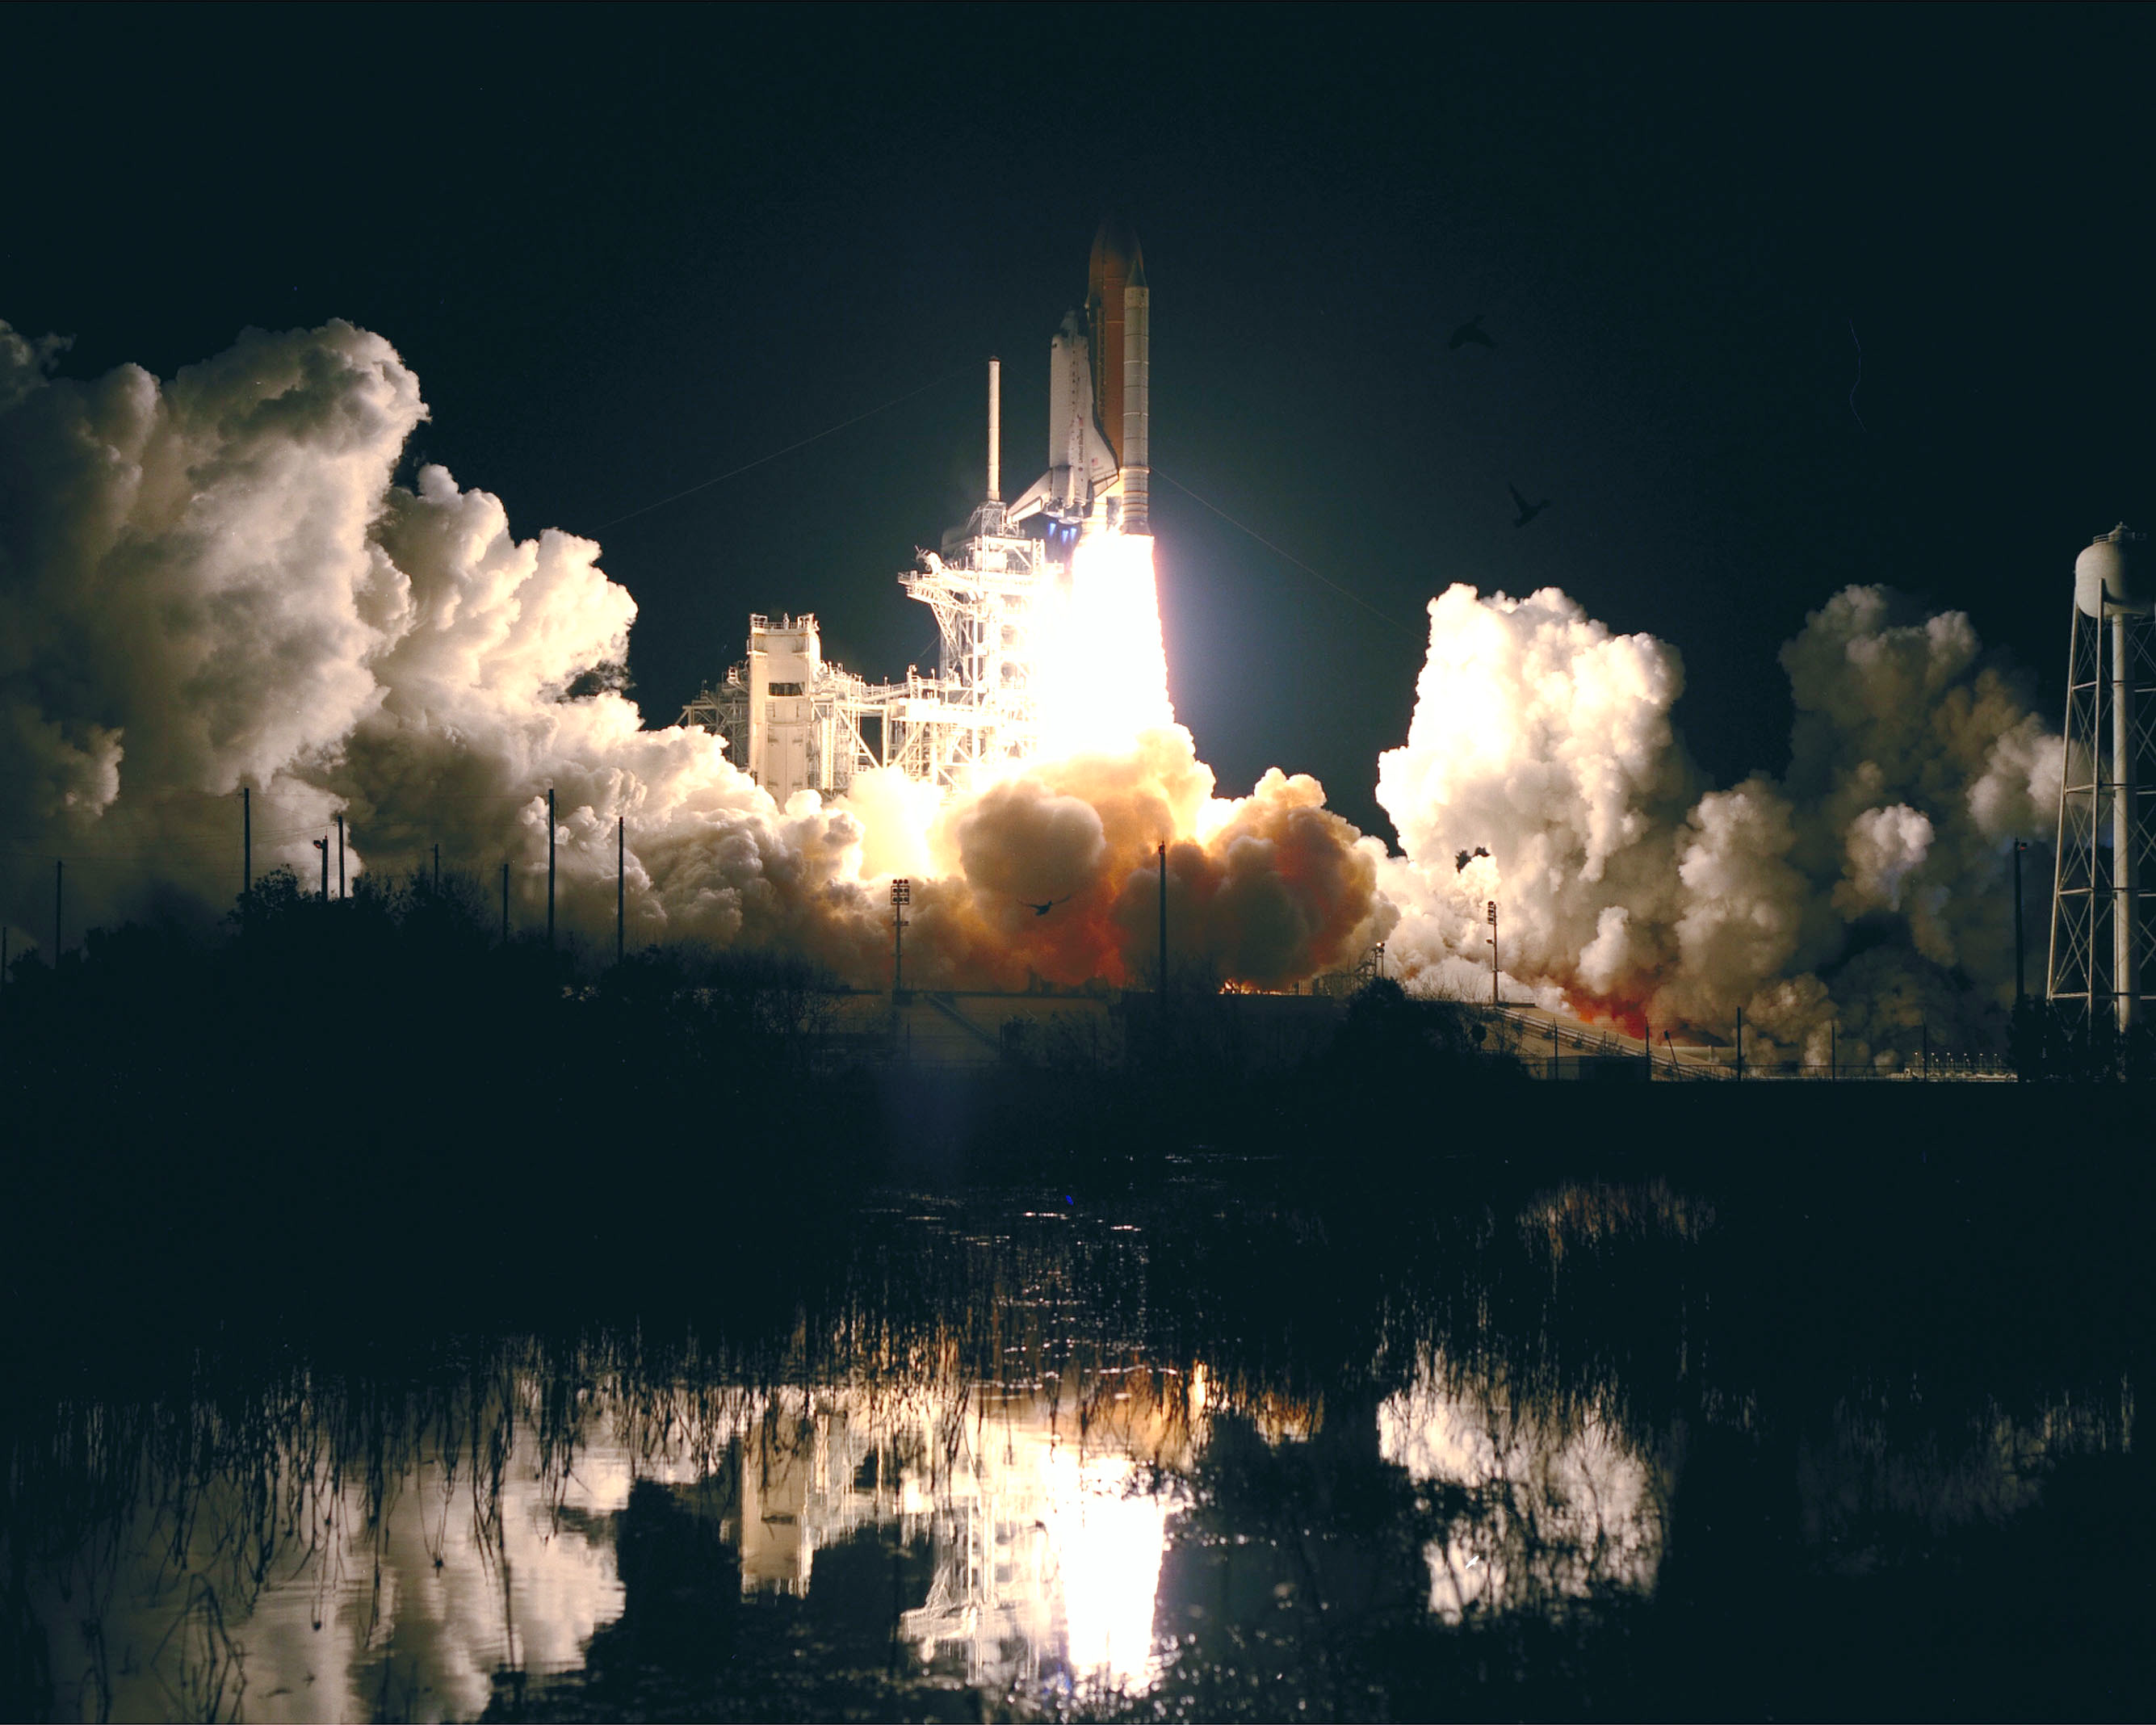

SM3A: Launch at the Lakeside

The Space Shuttle Discovery rises into the clear night sky to begin the 96th mission in the STS program.

Credit: NASA/ESA